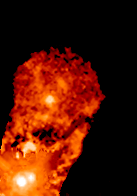

Binary Star XZ Tauri (Frame 1)

This is how XZ Tauri looked in 1995.

Credit: NASA, John Krist ( Space Telescope Science Institute), Karl Stapelfeldt (Jet Propulsion Laboratory), Jeff Hester (Arizona State University), Chris Burrows (European Space Agency/ Space Telescope Science Institute).